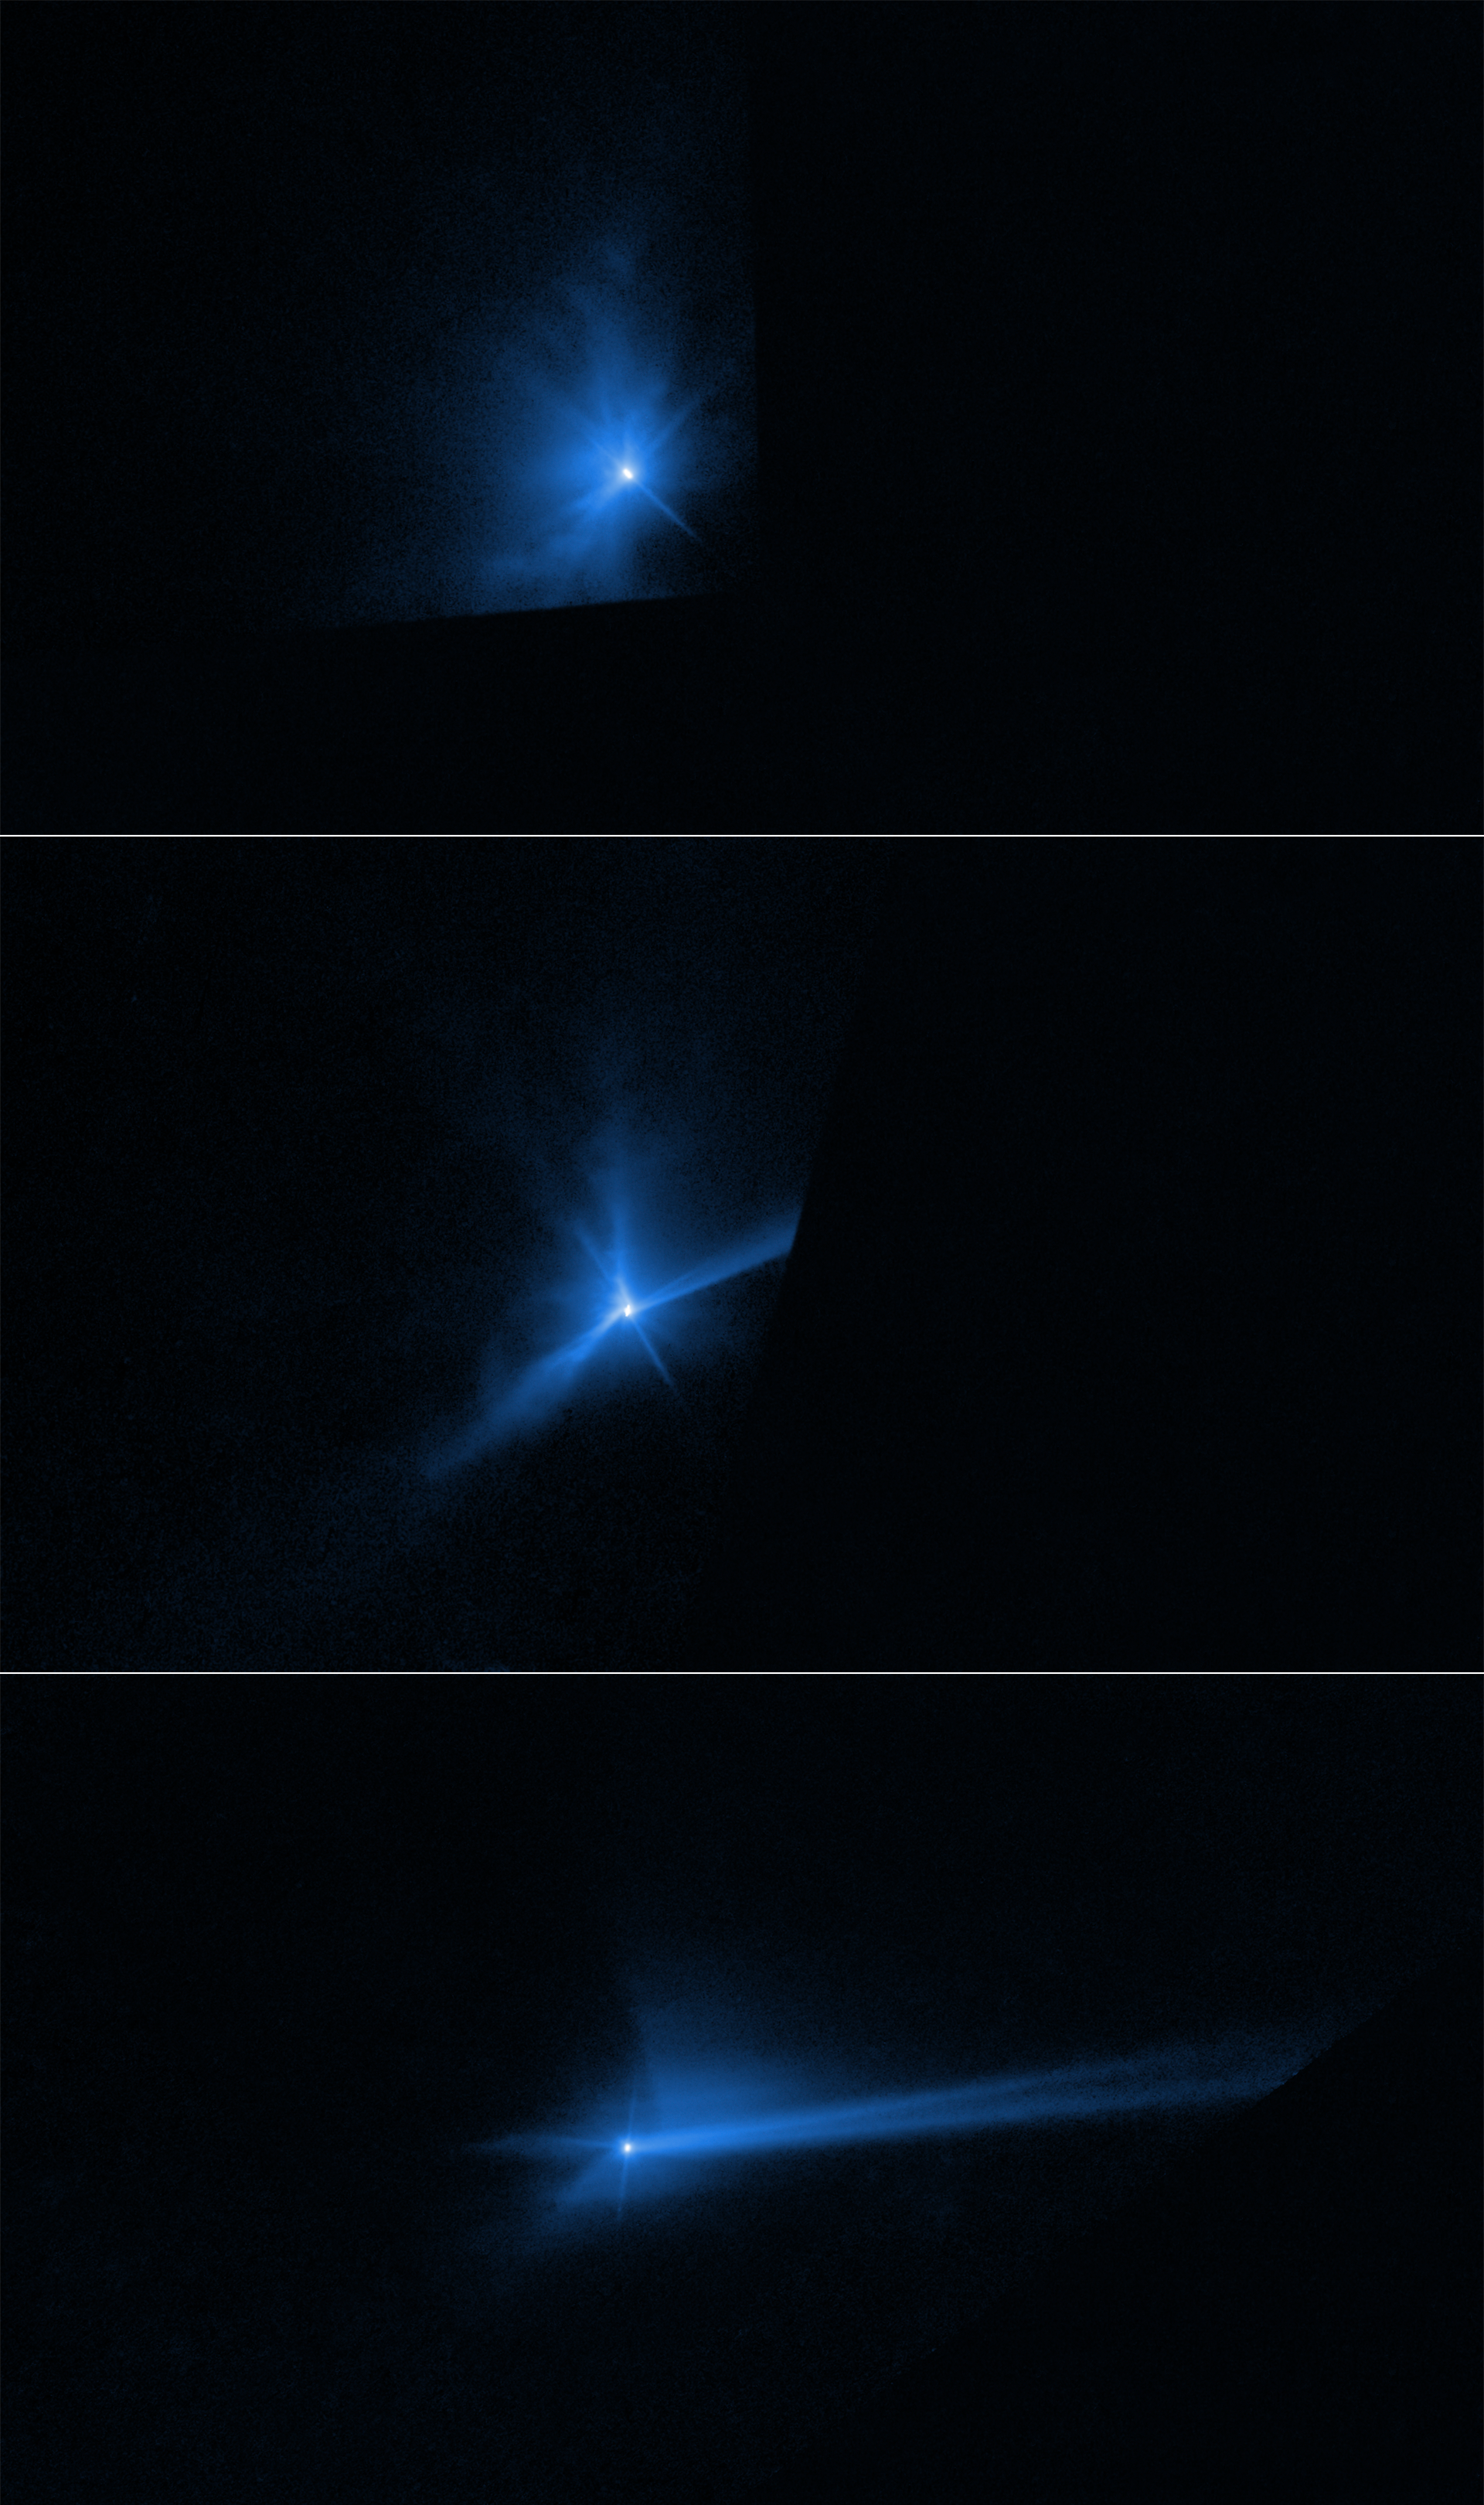

Hubble captures DART asteroid impact debris (clean)

These three panels capture the breakup of the asteroid Dimorphos when it was deliberately hit by NASA’s 545-kilogram Double Asteroid Redirection Test (DART) mission spacecraft on 26 September 2022. The NASA/ESA Hubble Space Telescope had a ringside view of the space demolition derby. The top panel, taken 2 hours after impact, shows an ejecta cone of an estimated 900,000 kilograms of dust.

The centre frame shows the dynamic interaction within the asteroid’s binary system that starts to distort the cone shape of the ejecta pattern about 17 hours after the impact. The most prominent structures are rotating, pinwheel-shaped features. The pinwheel is tied to the gravitational pull of the companion asteroid, Didymos.

In the bottom frame Hubble next captures the debris being swept back into a comet-like tail by the pressure of sunlight on the tiny dust particles. This stretches out into a debris train where the lightest particles travel the fastest and farthest from the asteroid. The mystery is compounded when Hubble records the tail splitting in two for a few days.

Credit: NASA, ESA, STScI, J. Li (PSI)